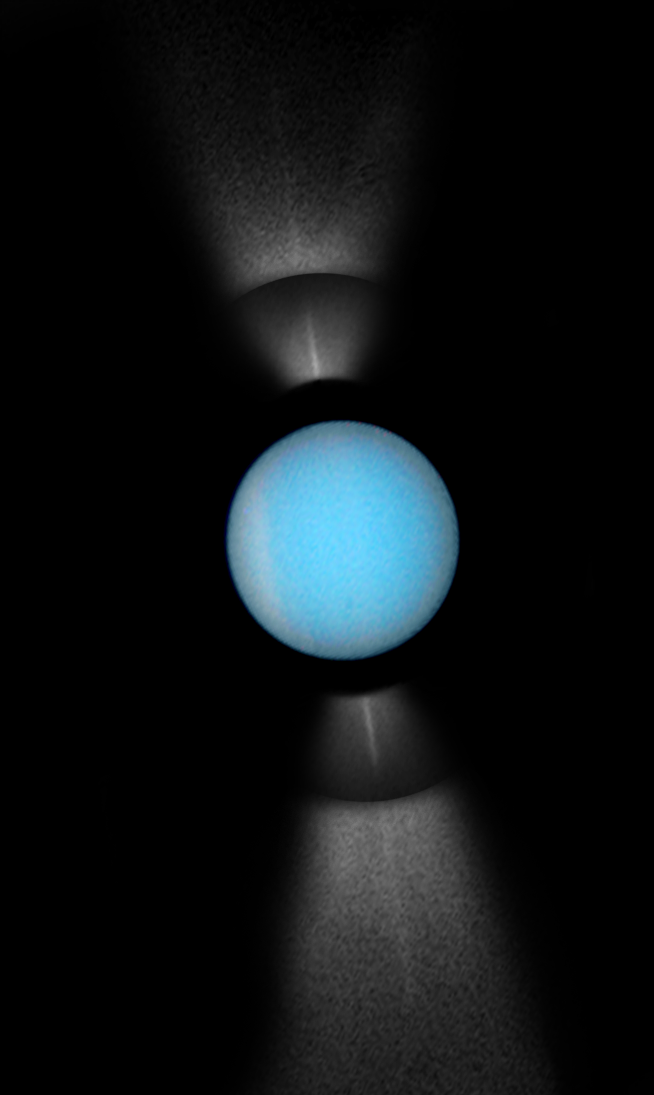

Hubble Captures Full View of Uranus' Rings on Edge

NASA's Hubble Space Telescope captures a rare view of the entire ring system of the planet Uranus, tilted edge-on to Earth.

The rings were photographed with Hubble's Wide Field Planetary Camera 2 on August 14, 2007.

Credit: NASA, ESA, M. Showalter (SETI Institute) and Z. Levay (STScI)